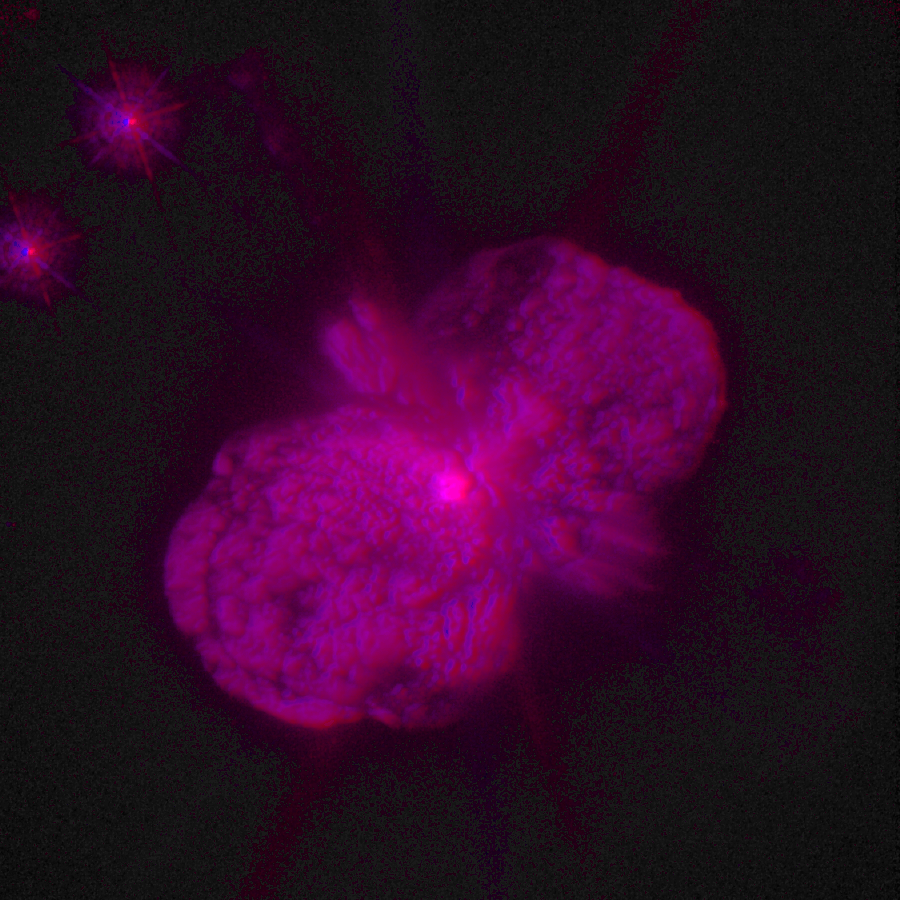

3D Image of Eta Carinae

This is a unique three-dimensional image of the star Eta Carinae, with its twin lobes and equatorial disk of expanding dust and gas.

To see the 3D structure the image must be viewed through colour 3D glasses with the left eye looking through a red filtered lens, and right eye looking through a blue filtered lens.

Credit: Jon Morse (University of Colorado), Kris Davidson (University of Minnesota), and NASA/ESA